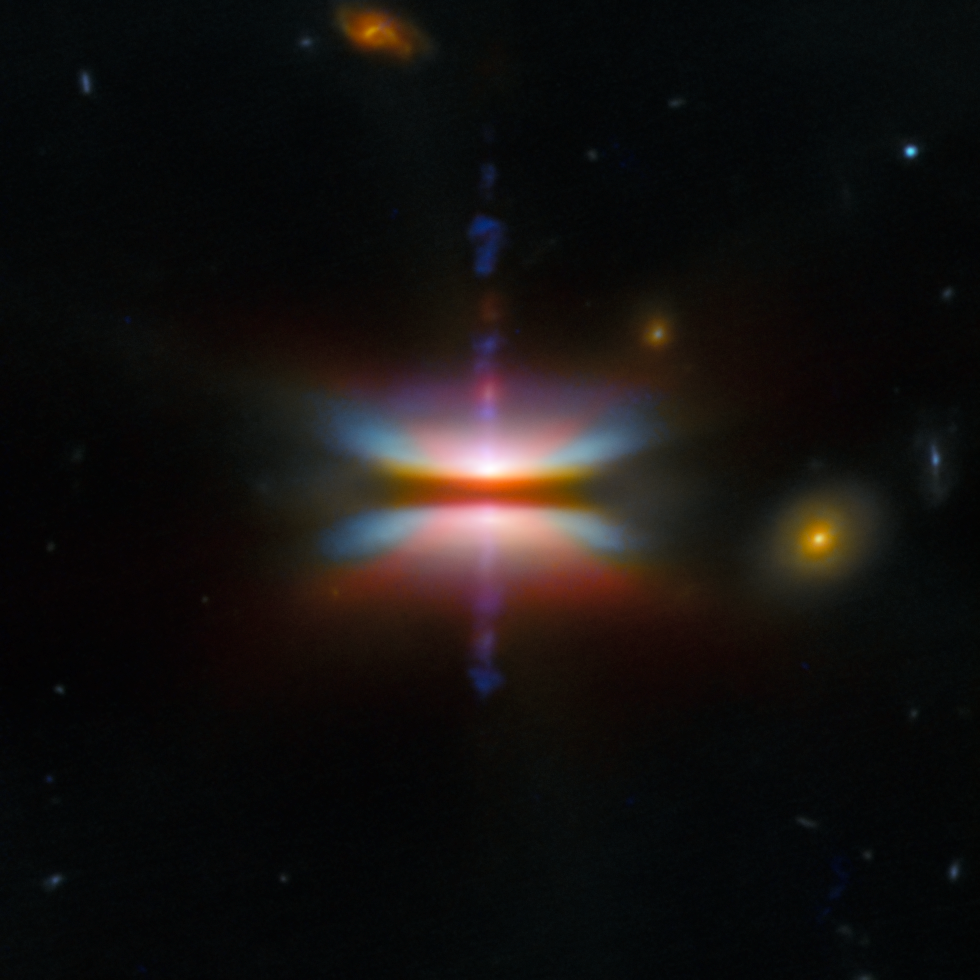

Tau 042021

This new image from the NASA/ESA/CSA James Webb Space Telescope presents Tau 042021, a protoplanetary disc that is one of two featured for month's ESA/Webb Picture of the Month. It’s also known as 2MASS J04202144+2813491, and it is found in the constellation Taurus, around 450 light-years away. It may look like a colourful spinning top, but the light show pictured here comes from a newly born star wreathed in a churning torus of gas and dust a thousand times as wide as the distance from here to the Sun.

Protoplanetary discs like these appear around stars that have recently been born. Eventually the new star will disperse all the dust with its ferocious radiation, but before that happens there’s a chance for the dust to clump together and grow into pebbles, planetesimals and eventually planets — hence, a protoplanetary disc. Whether planets appear, and what kind of planets they are, depends on how larger and smaller dust grains migrate in the disc. An edge-on view like this shows us if dust grains are settling into a layer of large dust grains at the core of the disc. Such a layer is critical for forming planets, and the thicker it is, the better.

In this image of Tau 042021, since the disc is nearly exactly edge-on to us, it appears as a dark band running straight across the centre of the image. Larger, millimetre-sized dust grains settle in this area from the outer regions of the disc and build up, creating the conditions for planets to potentially form. Tau 042021’s central star is hidden from us behind this dusty disc, but we can see plenty of evidence for its presence, most notably the purple jets blasting straight up and down — a common feature of young stars embedded in dusty discs.

Above and below the dark band, the dust grains gradually become smaller and smaller the farther out we look, to less than a millionth of a metre in size. They are lit by the central star, creating these colourful “wings” top and bottom. Different colours in the wings mark out different kinds of molecules, indexed by Webb’s keen infrared vision; the red areas forming a cross shape are thought to be part of a wind blowing hydrogen atoms and light molecules far out of the disc. Above and to the right of the disc, three distant galaxies appear in the background.

The detailed and eye-catching view shown here combines Webb’s images, taken with the Near-Infrared Camera NIRCam and the Mid-Infrared Imager MIRI, with visible-light data from the NASA/ESA Hubble Space Telescope. The knots in the jet that is perpendicular to the disc appear in different colours between the Hubble (bluer) and Webb (redder) images because of the motion of the jet in the 12 years between the observations.

Credit: ESA/Webb, NASA & CSA, ESA/Hubble, G. Duchêne